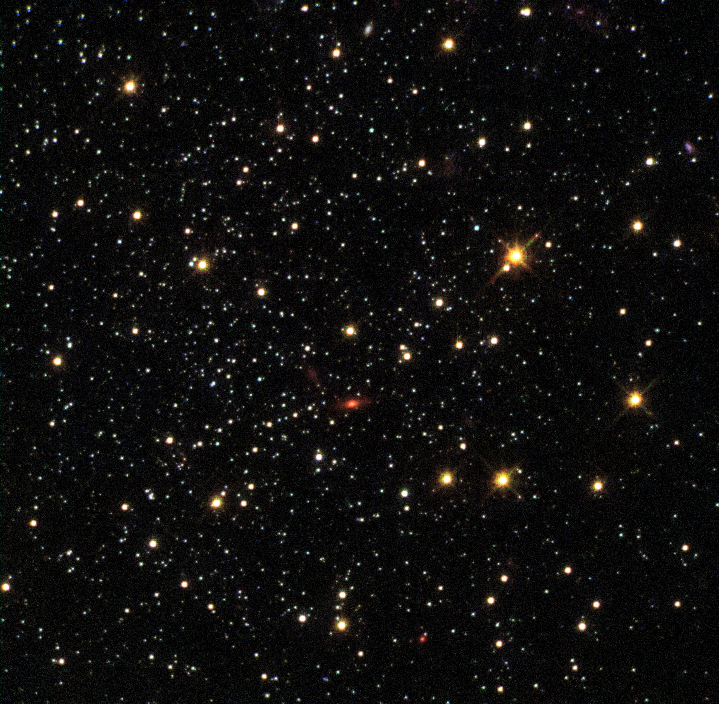

Globular cluster Fornax 1

This NASA/ESA Hubble Space Telescope image shows the globular cluster Fornax 1 in the dwarf galaxy Fornax.

New observations of this cluster and three others in the galaxy show that they are very similar to those found in our galaxy, the Milky Way. The finding is at odds with leading theories on how these clusters form — in these theories, globular clusters should be nestled among large quantities of old stars — and so the mystery of how these objects came to exist deepens.

This cluster’s position within the galaxy is shown in image G.

Credit: NASA, ESA, S. Larsen (Radboud University, the Netherlands)